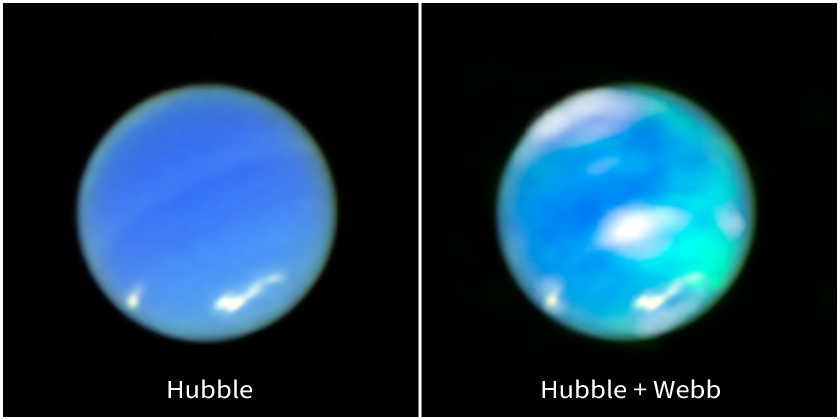

Neptune Auroras (Hubble and Webb Image)

At the left, an enhanced-color image of Neptune from the NASA/ESA Hubble Space Telescope. At the right, that image is combined with data from the NASA/ESA/CSA James Webb Space Telescope. The cyan splotches, which represent auroral activity, and white clouds, are data from Webb’s Near-Infrared Spectrograph (NIRSpec), overlaid on top of the full image of the planet from Hubble’s Wide Field Camera 3.

Auroras occur when energetic particles, often originating from the Sun, become trapped in a planet’s magnetic field and eventually strike the upper atmosphere. The energy released during these collisions creates the signature glow.

Webb’s detection of auroras on Neptune is the first time astronomers have captured direct evidence of this phenomenon on the planet most distant from the Sun. In addition to the visible glow in the imagery, the spectrum from Webb also found an extremely prominent emission line signifying the presence of the trihydrogen cation (H3+), which can be created in auroras.

Neptune’s auroras do not occur at the northern and southern poles of the planet, where we see auroras on planets like Earth and Jupiter, because of the strange nature of Neptune’s magnetic field, which is tilted by 47 degrees from the planet’s rotational axis.

Webb’s study of Neptune also revealed that the planet’s upper atmosphere has cooled by several hundred degrees, likely the reason that Neptune’s auroras have remained undetected for so long.

This image was created from Hubble and Webb data from proposals: 17187 (R. Windhorst) and 1249 (B. Frye).

Credit: NASA, ESA, CSA, STScI, Heidi Hammel (AURA), Henrik Melin (Northumbria University), Leigh Fletcher (University of Leicester), Stefanie Milam (NASA-GSFC)